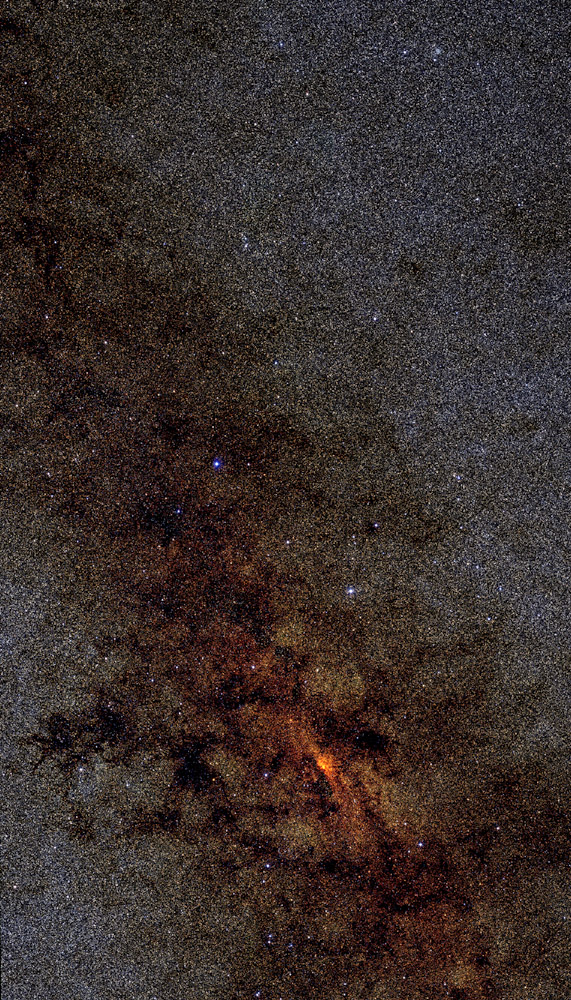

2 Micron all sky survey (2MASS) mosaic of the center of the Milky Way

The Two Micron All-Sky Survey (2MASS) was a survey of the whole sky in three infrared wavebands, which was taken between 1997 and 2001. 2MASS used two highly-automated 1.3-m telescopes, one at Mt. Hopkins, Arizona (for the Northern Hemisphere), and one at the Cerro Tololo Inter-American Observatory, Chile (for the Southern Hemisphere).

The advantage of the data taken in the near infrared was an unprecedented view of the Milky Way nearly free of the obscuring effects of interstellar dust. Therefore the survey revealed the true distribution of luminous mass, and thus the largest structures, over the entire length of the Galaxy. Especially a look at the center of the Milky Way revealed details, which could never have been seen in the optical, as this region of obscured by various clouds of dust and gas.

The resulting data and images from 2MASS are currently in the public domain, and may be accessed online for free by anyone.

Credit: University of Massachusetts and Infrared Processing and Analysis Center